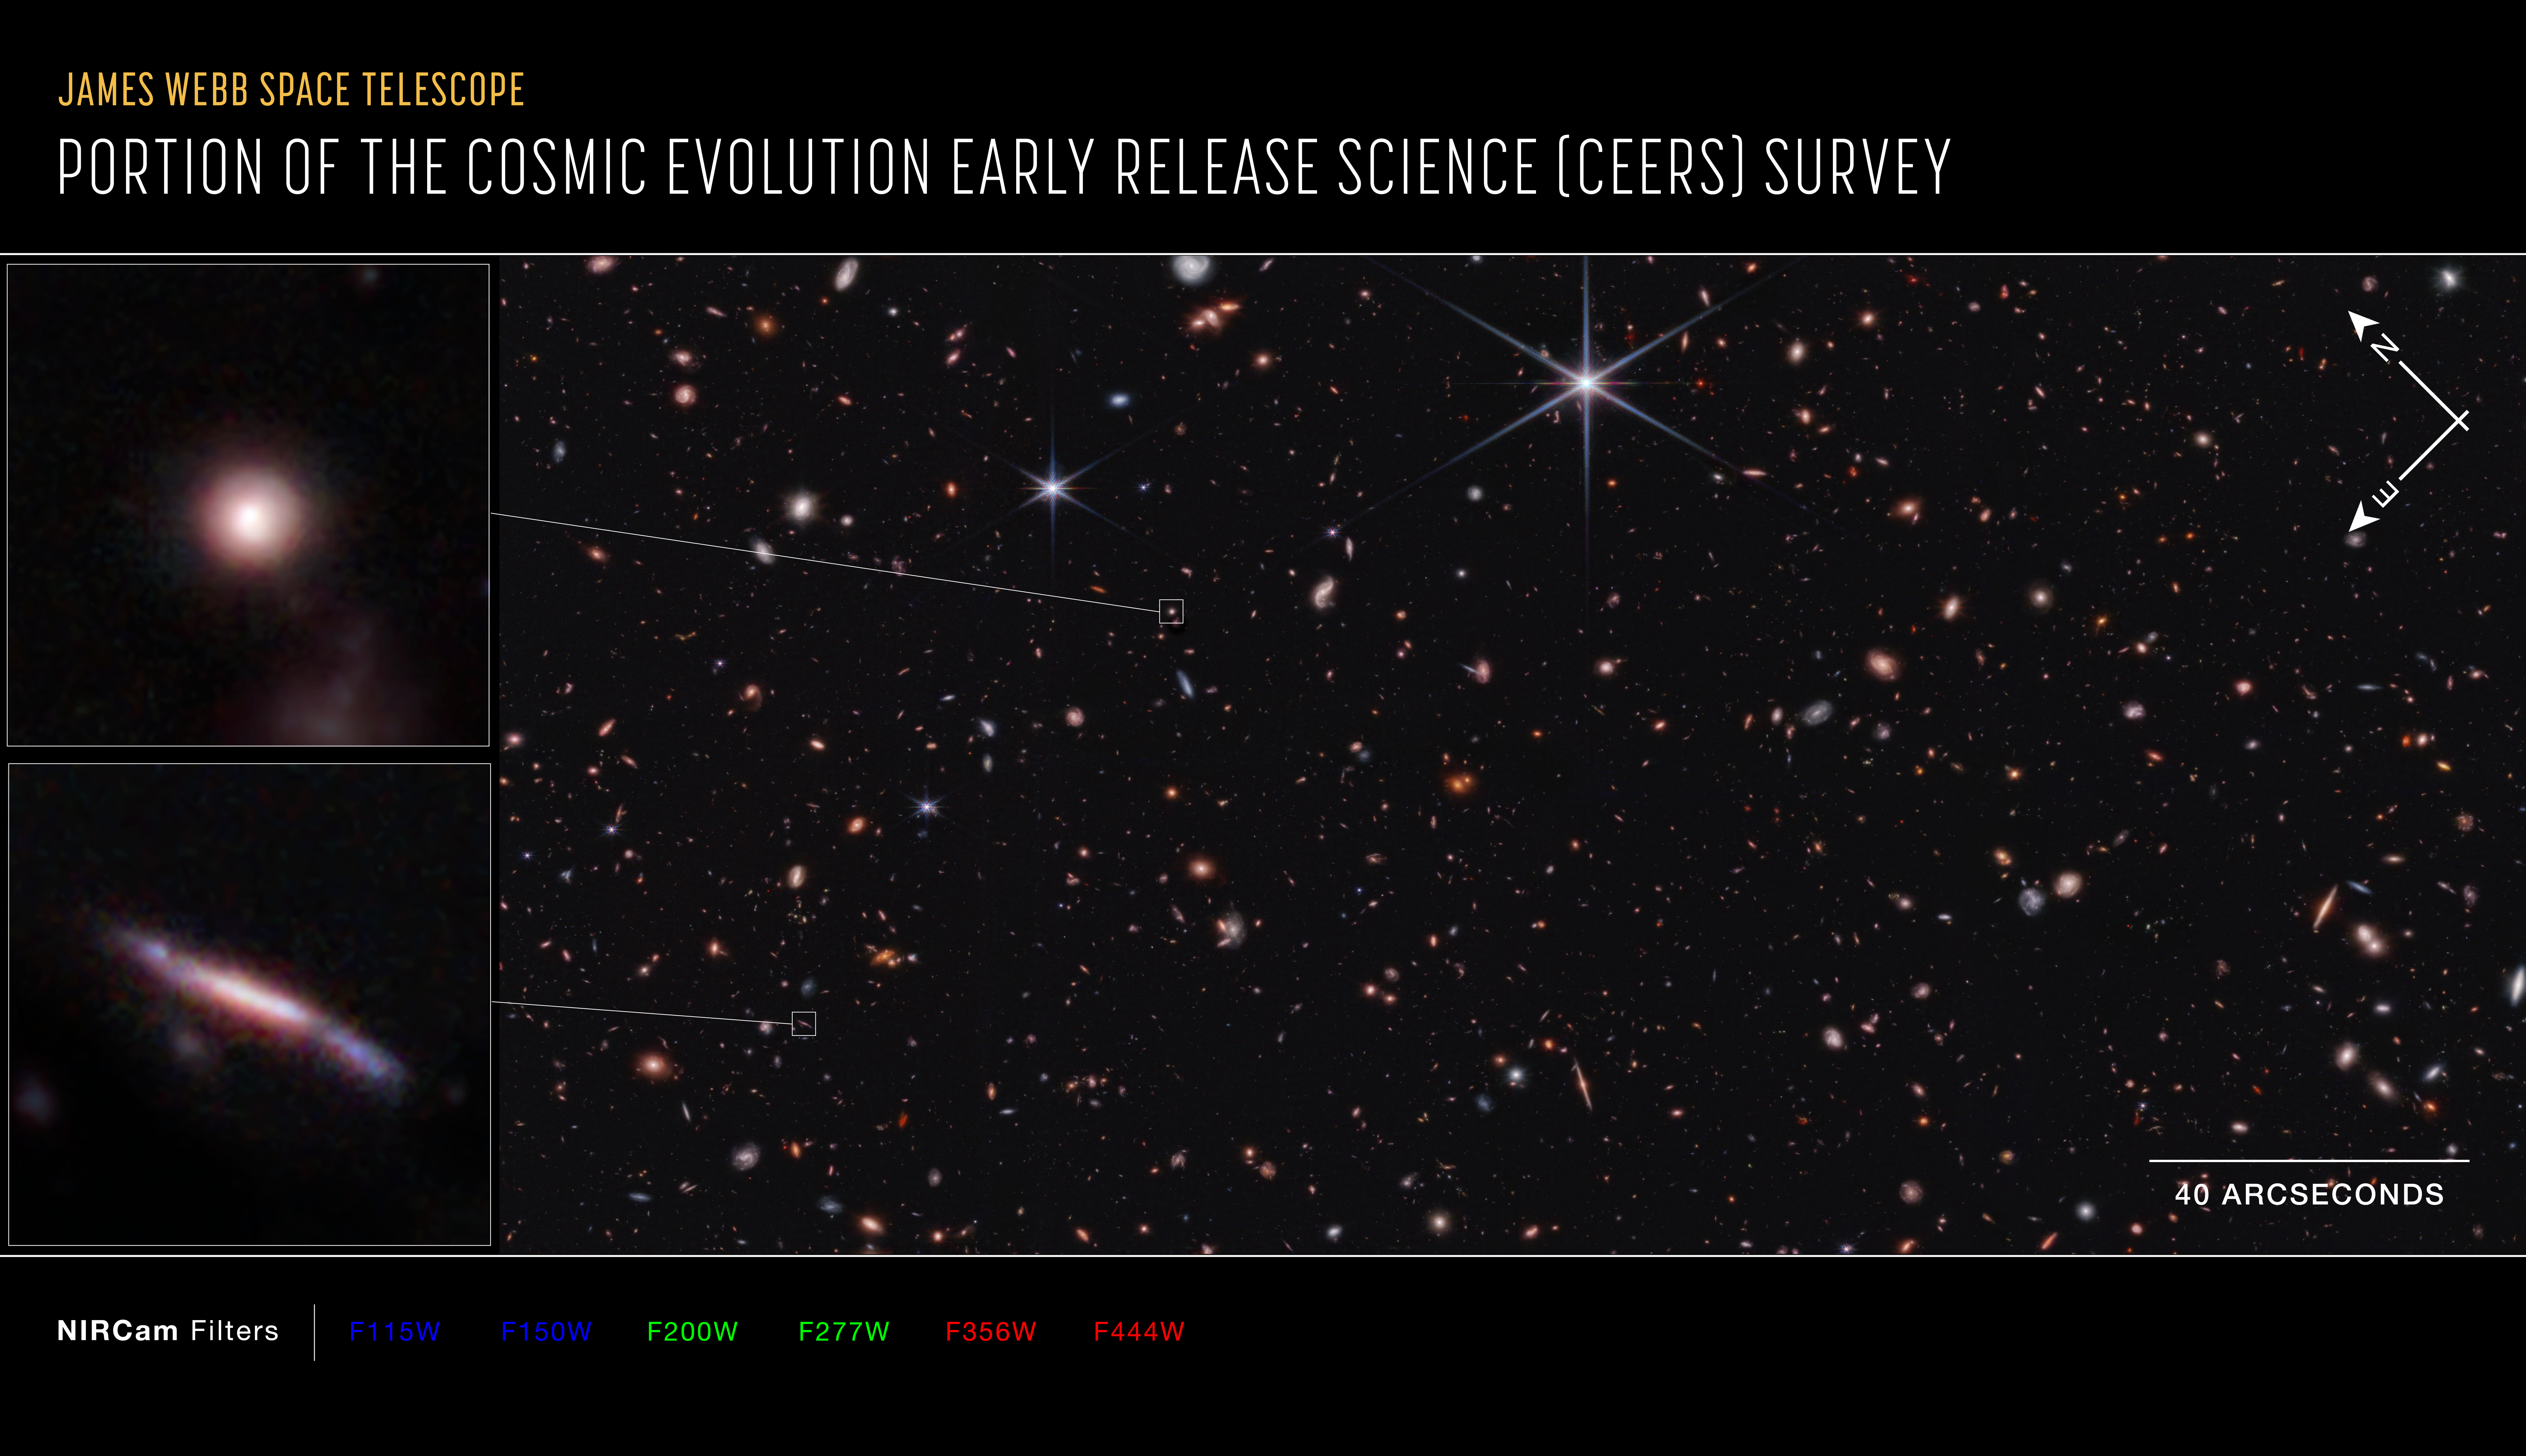

Portion of Cosmic Evolution Early Release Science (CEERS) survey (NIRCam compass image)

This is a portion of the Cosmic Evolution Early Release Science (CEERS) Survey, made up of several near-infrared pointings from NIRCam (the Near-Infrared Camera) aboard the NASA/ESA/CSA James Webb Space Telescope. These observations are within the same region studied by the Hubble Space Telescope, which is known as the Extended Groth Strip.

The north and east compass arrows show the orientation of the image on the sky. Note that the relationship between north and east on the sky (as seen from below) is flipped relative to direction arrows on a map of the ground (as seen from above).

This image shows invisible near-infrared wavelengths of light that have been translated into visible-light colours. The colour key shows which NIRCam filters were used when collecting the light. The color of each filter name is the visible light colour used to represent the infrared light that passes through that filter.

The scale bar is labelled in arcseconds, which is a measure of angular distance on the sky. One arcsecond is equal to an angular measurement of 1/3600 of one degree. There are 60 arcminutes in a degree and 60 arcseconds in an arcminute. (The full Moon has an angular diameter of about 30 arcminutes.) The actual size of an object that covers one arcsecond on the sky depends on its distance from the telescope.

Credit: NASA, ESA, CSA, STScI, S. Finkelstein (University of Texas at Austin), M. Bagley (University of Texas at Austin)